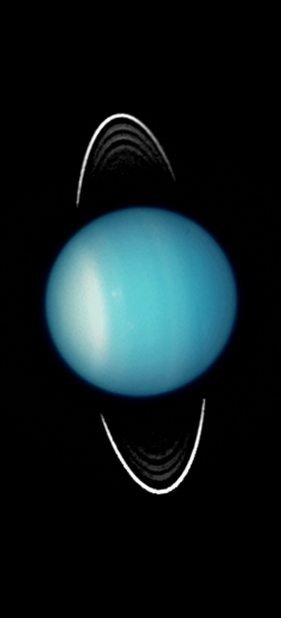

Uranus 2003

Uranus as seen by the NASA/ESA Hubble Space Telescope in 2003.

Credit: NASA, ESA, and M. Showalter (SETI Institute)